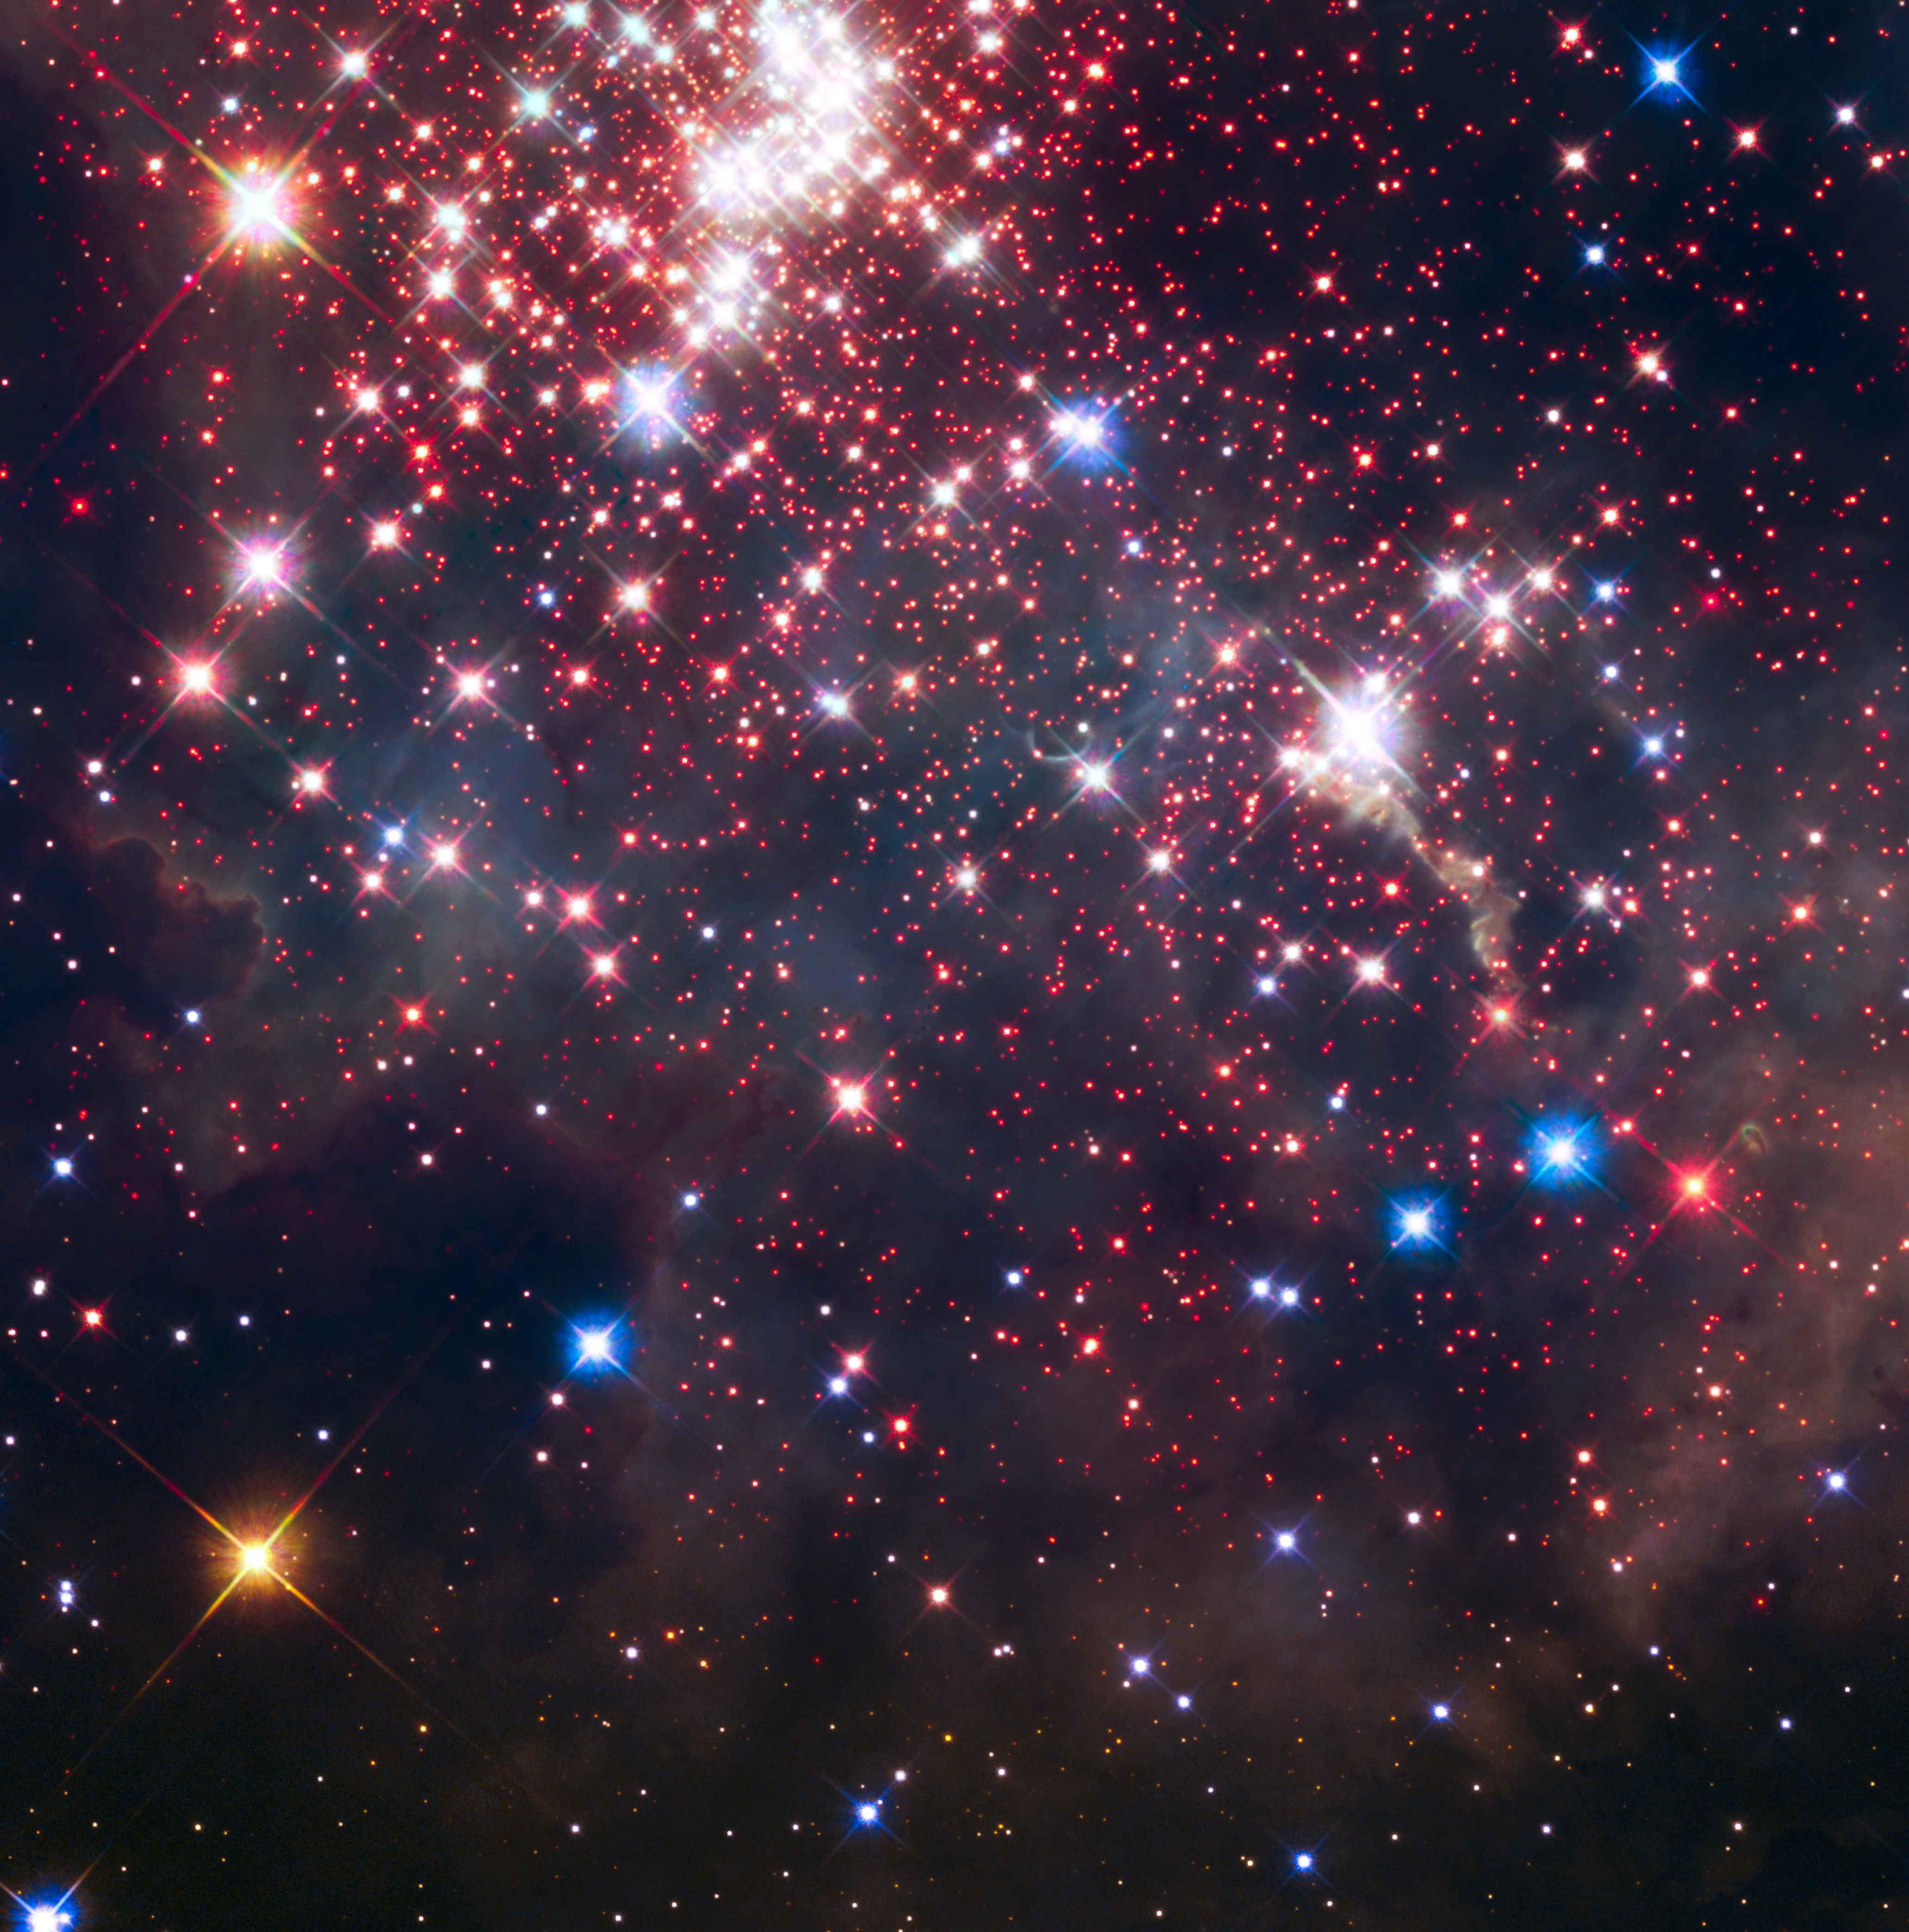

Westerlund 2 (HST image)

This image from the NASA/ESA Hubble Space Telescope showcases part of the Westerlund 2 star cluster that was featured as Hubble’s 25th anniversary image in 2015. The full image and its details can be explored here.

Credit: NASA, ESA, the Hubble Heritage Team (STScI/AURA), A. Nota (ESA/STScI), and the Westerlund 2 Science Team